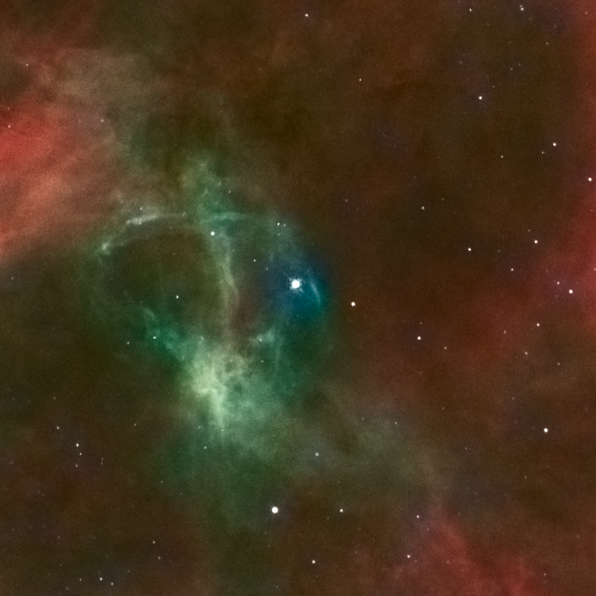

Stellar runaway

The young star, only one million to two million years old, may have travelled about 375 light-years from its suspected home in star cluster R136.

Credit: NASA, ESA, J. Walsh (ST-ECF) and ESO Acknowledgment: Z. Levay (STScI)